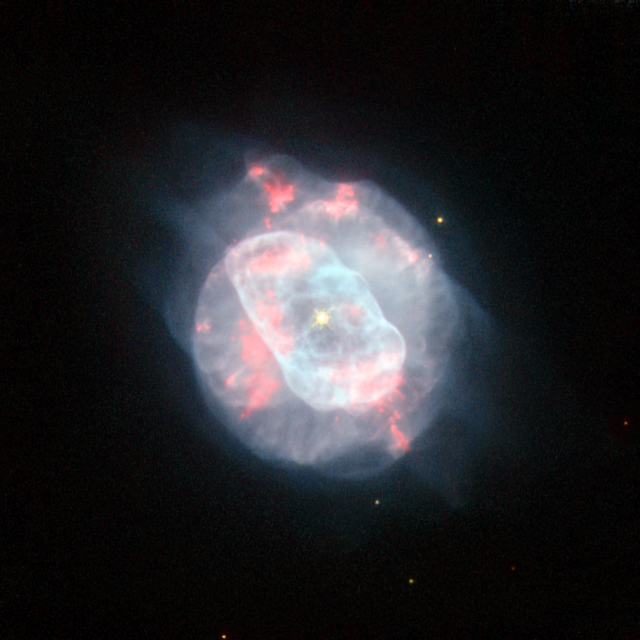

The beauty of asymmetry

The NASA/ESA Hubble Space Telescope has captured a planetary nebula with unconventional good looks.

Planetary nebulae signal the demise of mid-sized stars (up to about eight times the mass of the Sun); when the star’s hydrogen fuel supply is exhausted, its outer layers expand and cool, creating a cocoon of gas and dust. This gas then glows as it is bathed in the strong ultraviolet radiation from the central star. NGC 5882 is a quite bright, but small, example of a planetary nebula that lies deep in the southern Milky Way in the constellation of Lupus (The Wolf).

Planetary nebulae sometimes have a perfectly symmetrical appearance, with gas being bellowed out from the dying star evenly in every direction. However, this isn’t the case for NGC 5882, as this Hubble image shows. It appears to have two distinct, but non-uniform regions: an elongated inner shell of gas and a fainter aspherical shell that surrounds it.

Hubble’s sharp view reveals the intricate knots, filaments and bubbles within these shells. But it’s the dying star at the heart of the planetary nebula that dominates the image, shining brightly with an incredible surface temperature of about 70 000 degrees Celsius. (For comparison, the surface temperature of the Sun is only about 5500 degrees Celsius.) The high surface temperature of this white dwarf is a result of the star’s struggle for survival, finding new ways to prevent itself from collapsing under its own gravity.

This image is dedicated to all ESA/Hubble Facebook friends on the occasion of our Facebook page reaching 50 000 friends. If you want to be fascinated every week by awe-inspiring photos of the Universe, stay in touch with the most recent discoveries from Hubble, find out about our competitions and events or simply get in touch with people that share the same curiosity about the Universe, join us on Facebook.

This picture comes from images taken with Hubble’s Wide Field Planetary Camera 2. Light that comes from glowing ionised oxygen is coloured blue (through the F502N filter), yellow/green light (through the broad F555W filter) is shown as green, the light from glowing hydrogen (through the F656N filter) is shown as dark red and light from glowing nitrogen is shown as bright red (through the F658N filter). The exposure times were 320 s, 104 s, 140 s and 1200 s, respectively and the field of view is just 29 arcseconds across.

Credit: ESA/Hubble & NASA